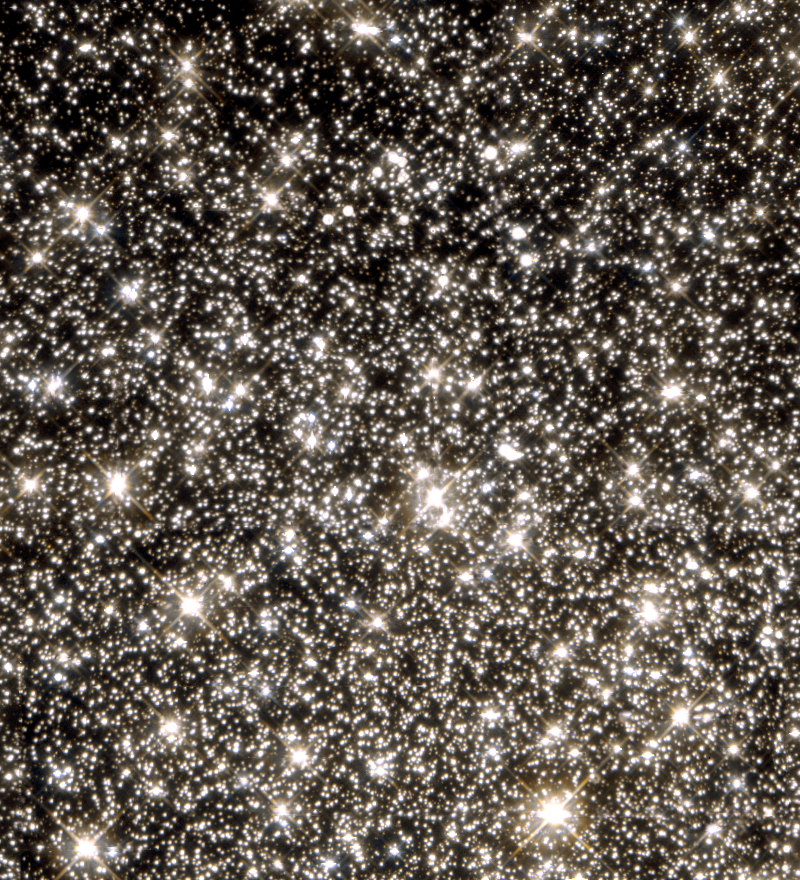

Hint of planet-sized drifters bewilders Hubble scientists (WFPC2 view)

This image shows the globular cluster M22 as seen with the NASA/ESA Hubble Space Telescope's workhorse instrument, the Wide Field and Planetary Camera 2. A team of American and European astronomers has studied the cluster in search for traces of short-lived brightening, due to an effect called microlensing, of faint stars in the background (too faint to be seen in this representation). Seven microlensing events were seen: one 'normal' event where a dwarf star in M22 passed in front of a background star, and six short events strongly suggesting the existence of 'free-floating' planet-sized objects in M22. If confirmed these planets would be the smallest detected which are not orbiting any star. M22, also known as NGC 6656, is the brightest globular cluster visible from the Northern hemisphere and it is an easy naked eye object. The 12 to 14 billion year old cluster is about 8, 500 light years distant and about 65 light years across. Its angular diameter is 24 arc minutes or almost the size of the full Moon. This Hubble view measures about 3 light years across.

Credit: NASA, ESA & K. Sahu (STScI)